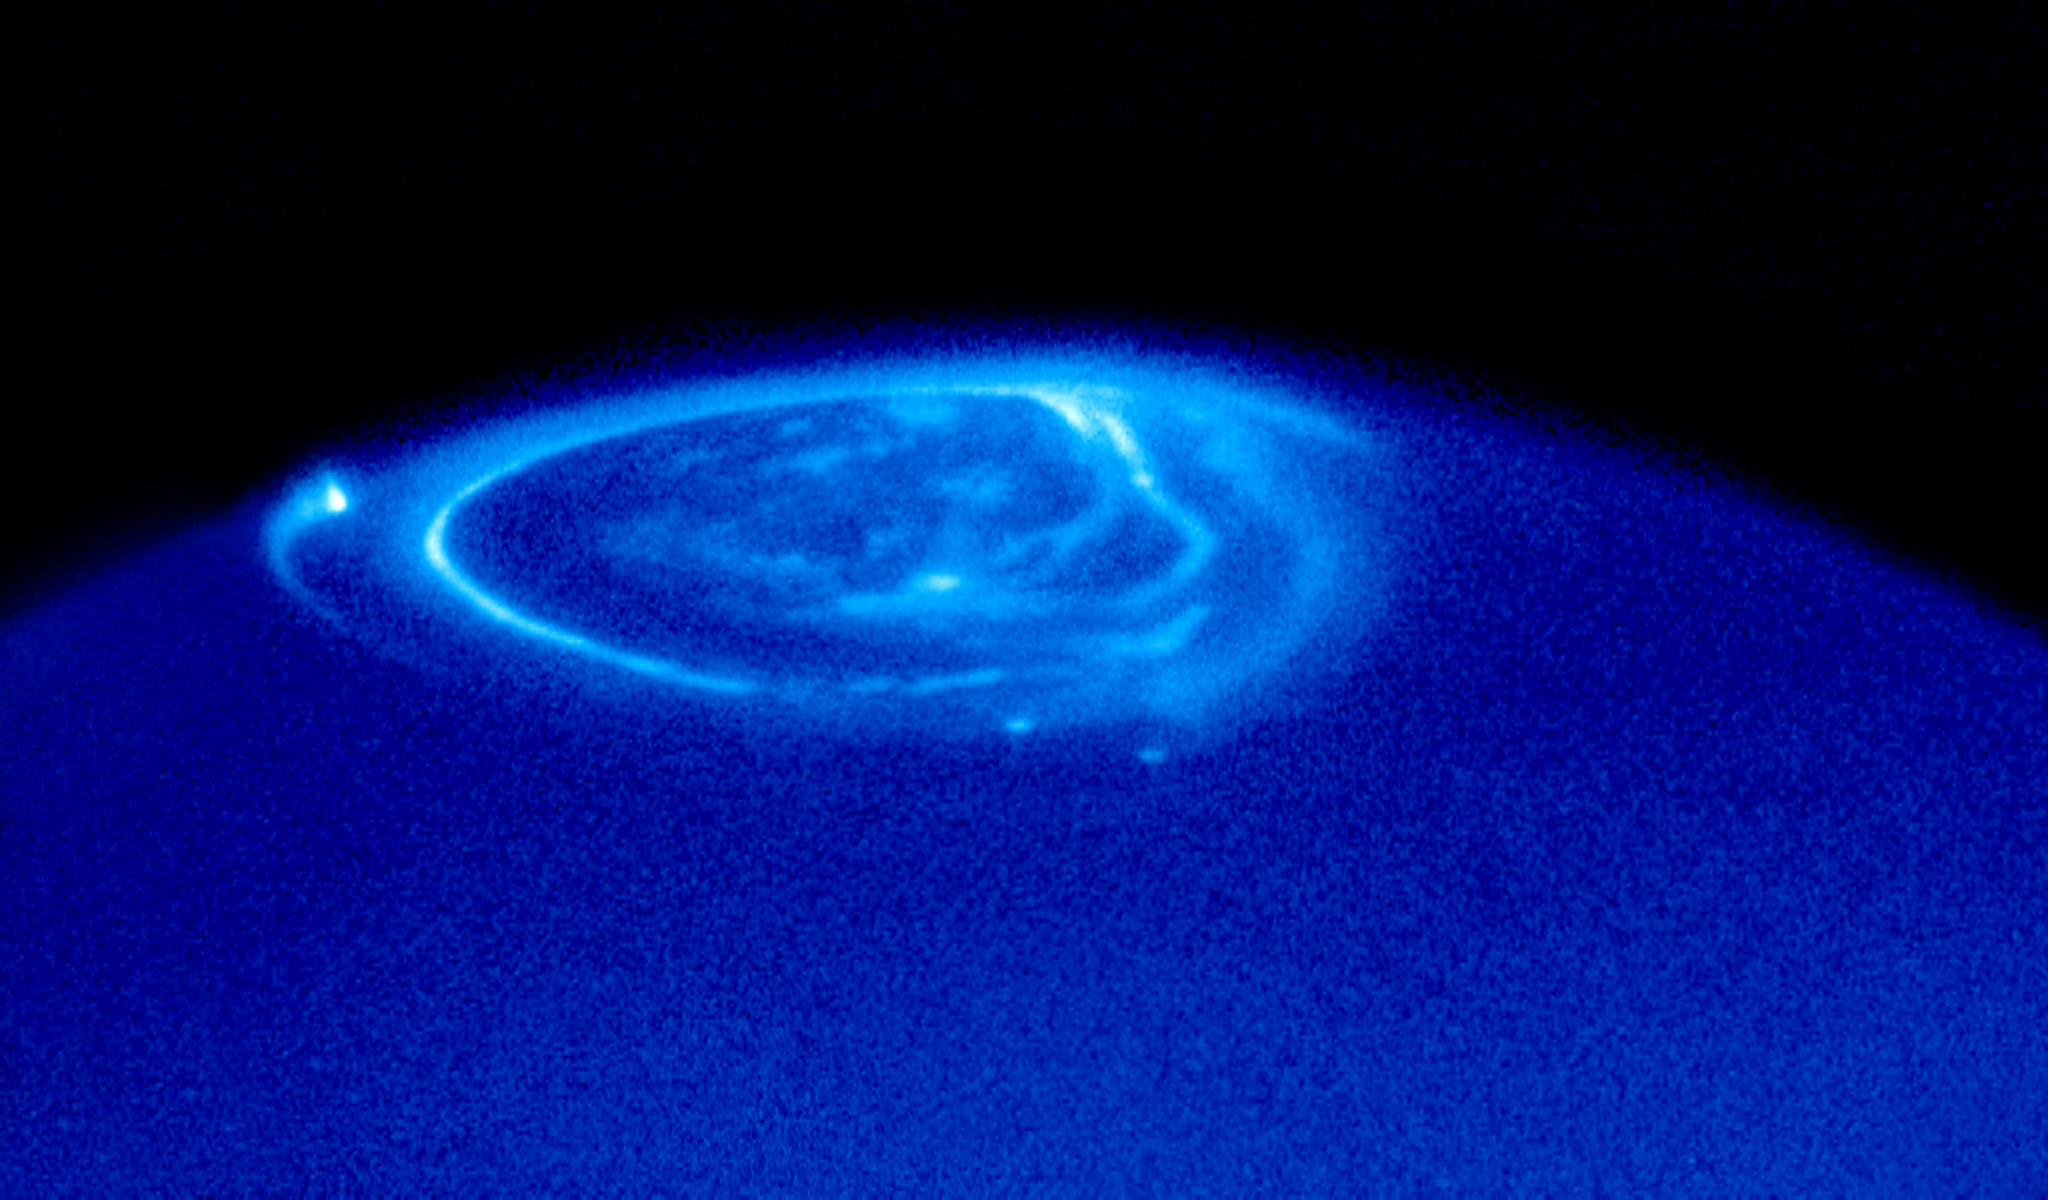

Uncovering the mysteries of Jupiter's aurora

This ultraviolet image of Jupiter was taken with the Hubble Space Telescope Imaging Spectrograph (STIS) on 26 November 1998 and gives a good impression of the observations that Hubble will make in the weeks to come. The bright emissions above the dark blue background are auroral lights, similar to those seen above the Earth's polar regions. The aurorae are curtains of light resulting from high energy electrons following the planet's magnetic field into the upper atmosphere, where collisions with atmospheric atoms and molecules produce the observed light. On Jupiter one can normally see three different types of auroral emissions:

a) a main oval, centred on the magnetic north pole

b) a pattern of more diffuse emissions inside the polar cap and

c) a unique auroral feature showing the 'magnetic footprints' of three of Jupiter's satellites. These 'footprints' can be seen in this image: from Io (along the left-hand limb), from Ganymede (near the centre just below the reference oval) and from Europa (just below and to the right of Ganymede's auroral footprint). These emissions are unlike anything seen on Earth and are produced by electric currents generated at the satellites that then flow along Jupiter's magnetic field, weaving in and out of its upper atmosphere.

This incredibly detailed image was taken on November 26 1998 when Jupiter was at a distance of 700 million km from Earth. The image was taken in UV light at 140 nm.

Credit: NASA, ESA & John T. Clarke (Univ. of Michigan)